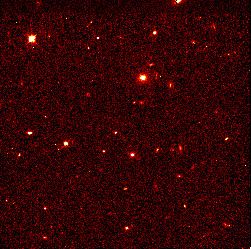

Hubble pinpoints distant supernovae

These Hubble Space Telescope images pinpoint three distant supernovae, which exploded and died billions of years ago. Scientists are using these faraway light sources to estimate if the universe was expanding at a faster rate long ago and is now slowing down.

Credit: Peter Garnavich, Harvard-Smithsonian Center for Astrophysics, the High-z Supernova Search Team, and NASA/ESA